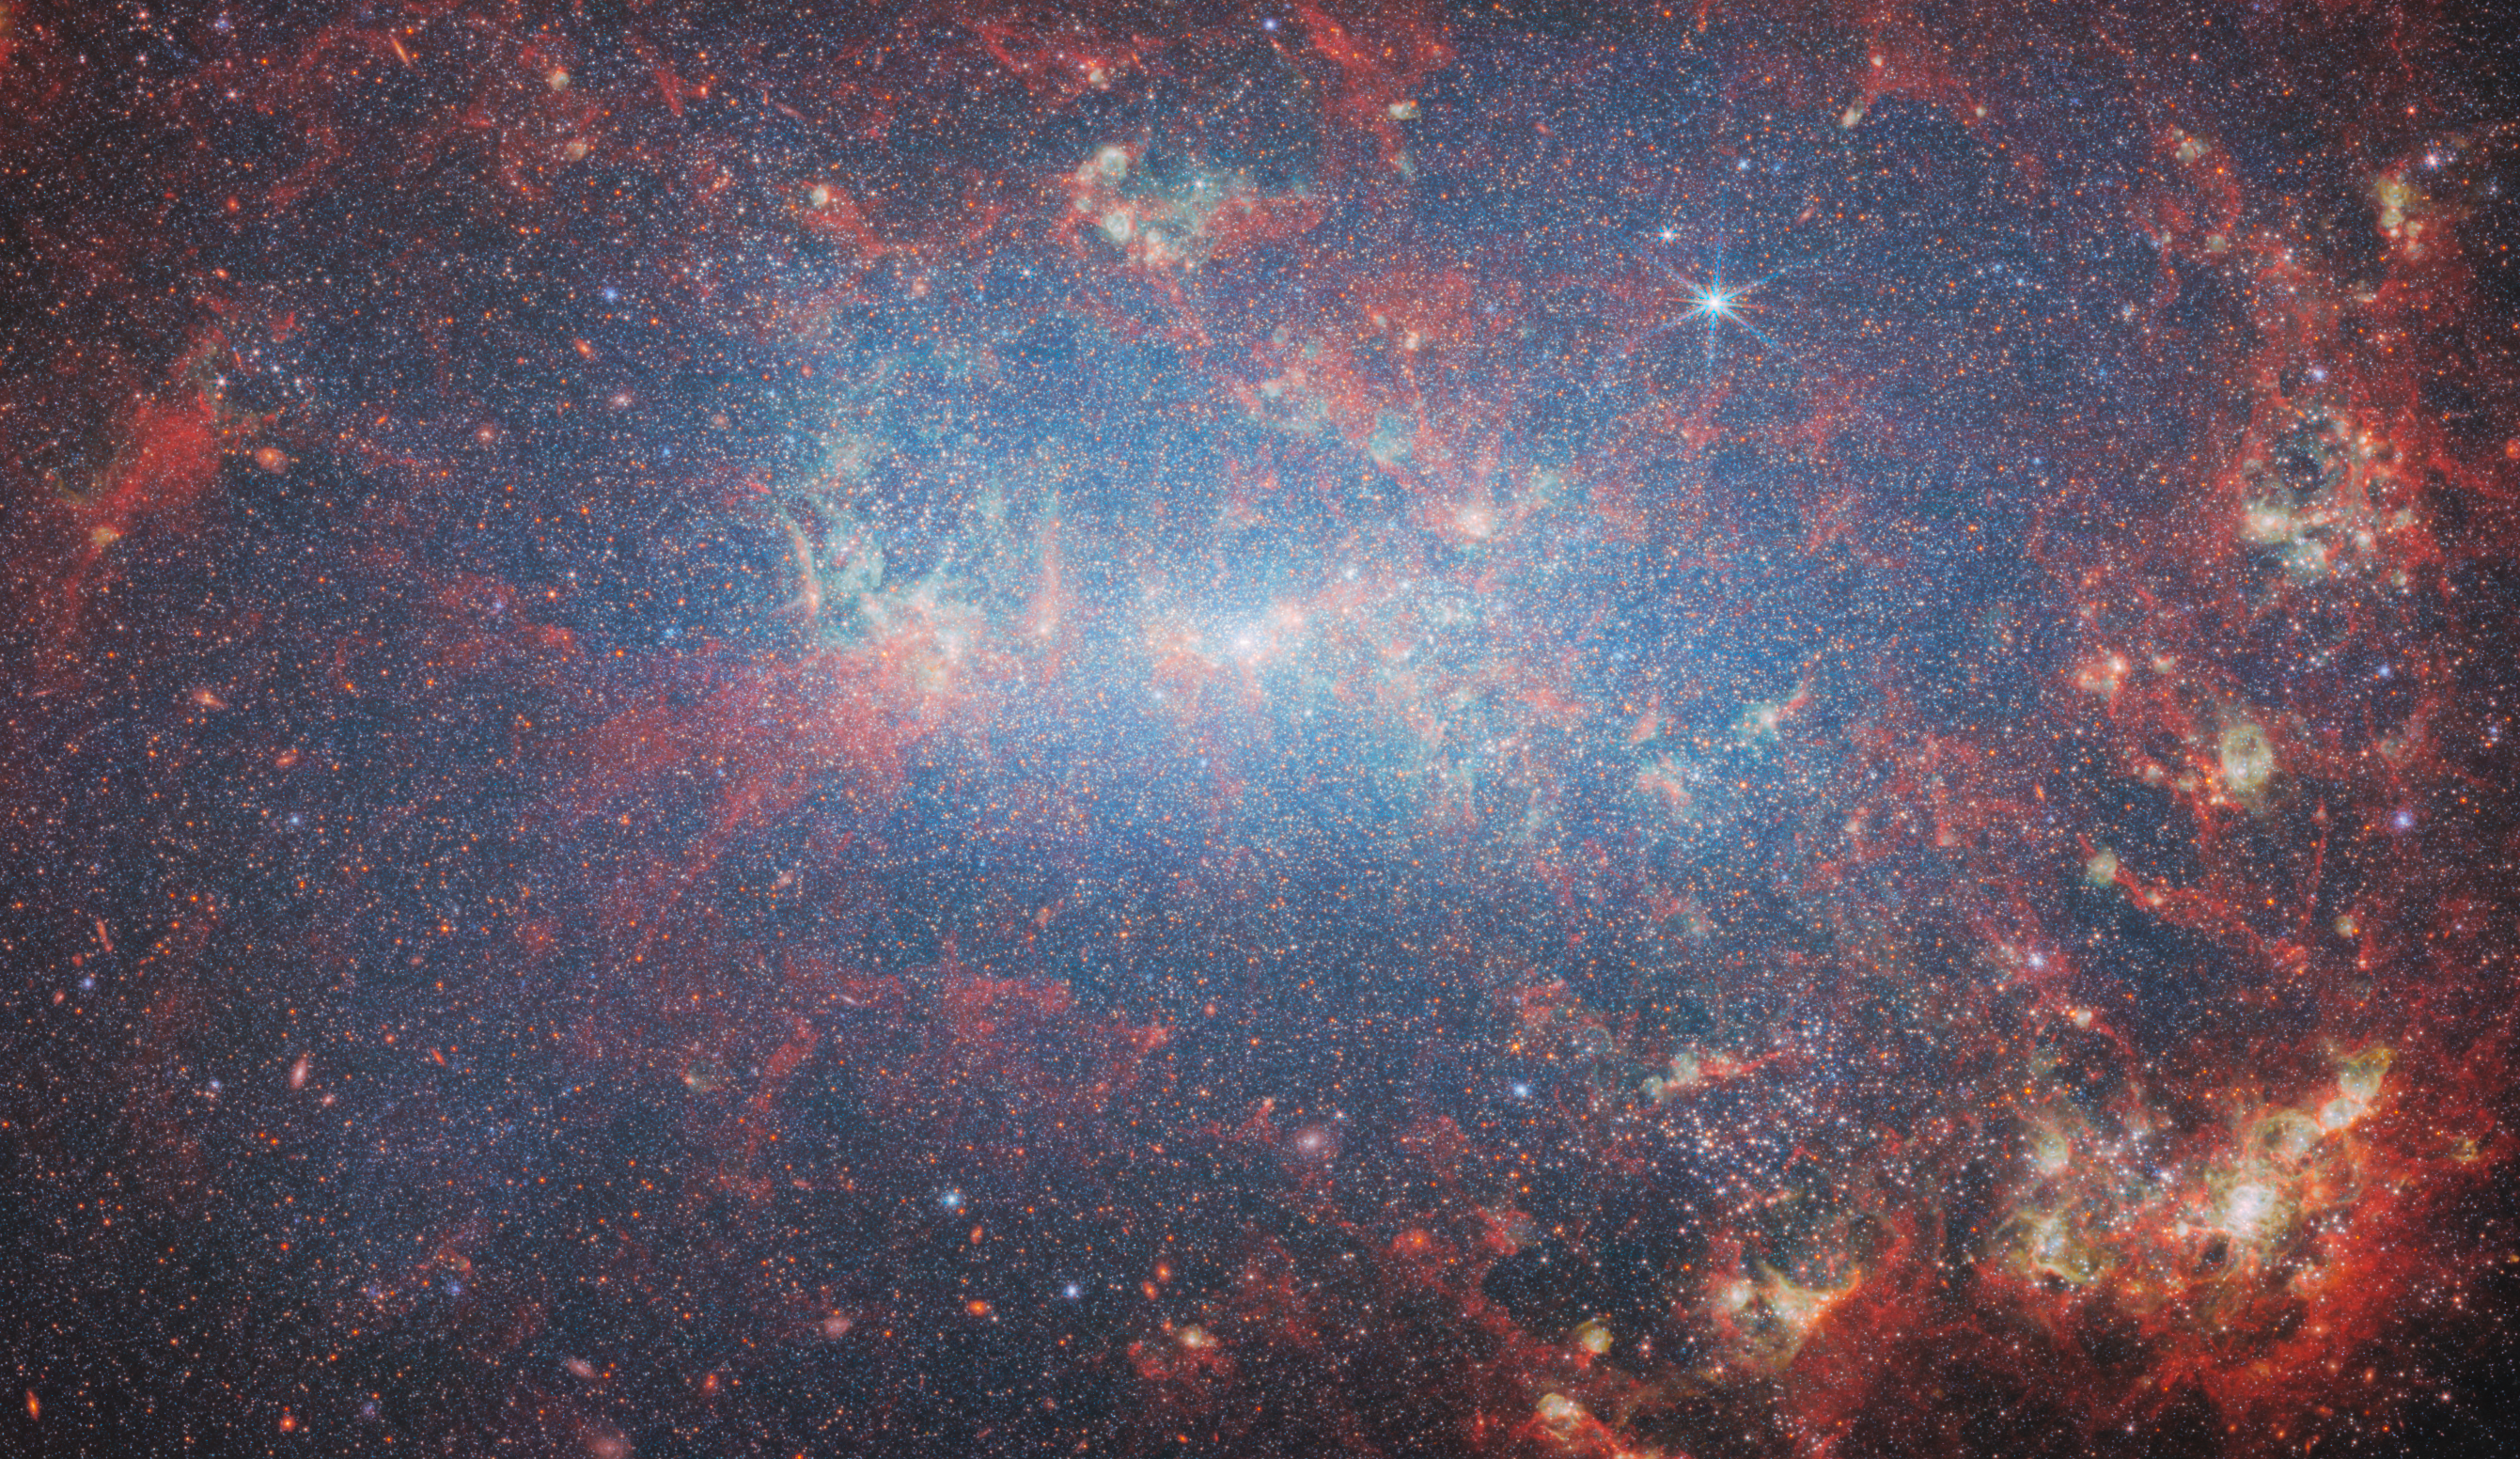

NGC 4449 (NIRCam image - cropped)

Featured in this new image from the NASA/ESA/CSA James Webb Space Telescope is the dwarf galaxy NGC 4449. This galaxy, also known as Caldwell 21, resides roughly 12.5 million light-years away in the constellation Canes Venatici. It is part of the M94 galaxy group, which lies close to the Local Group that hosts our Milky Way.

NGC 4449 has been forming stars for several billion years, but it is currently experiencing a period of star formation at a much higher rate than in the past. Such unusually explosive and intense star formation activity is called a starburst and for that reason NGC 4449 is known as a starburst galaxy. In fact, at the current rate of star formation, the gas supply that feeds the production of stars would only last for another billion years or so. Starbursts usually occur in the central regions of galaxies, but NGC 4449 displays more widespread star formation activity, and the very youngest stars are observed both in the nucleus and in streams surrounding the galaxy. It's likely that the current widespread starburst was triggered by interaction or merging with a smaller companion; indeed, astronomers think NGC 4449's star formation has been influenced by interactions with several of its neighbours.

The image was captured by Webb’s NIRCam, or Near-InfraRed Camera. In this image, the bright red spots correspond to regions rich in hydrogen that have been ionised by the radiation from the newly formed stars. The diffuse gradient of blue light around the central region shows the distribution of older stars. The compact light-blue regions within the red ionised gas, mostly concentrated in the galaxy’s outer region, show the distribution of young star clusters.

Credit: ESA/Webb, NASA & CSA, A. Adamo (Stockholm University) and the FEAST JWST team